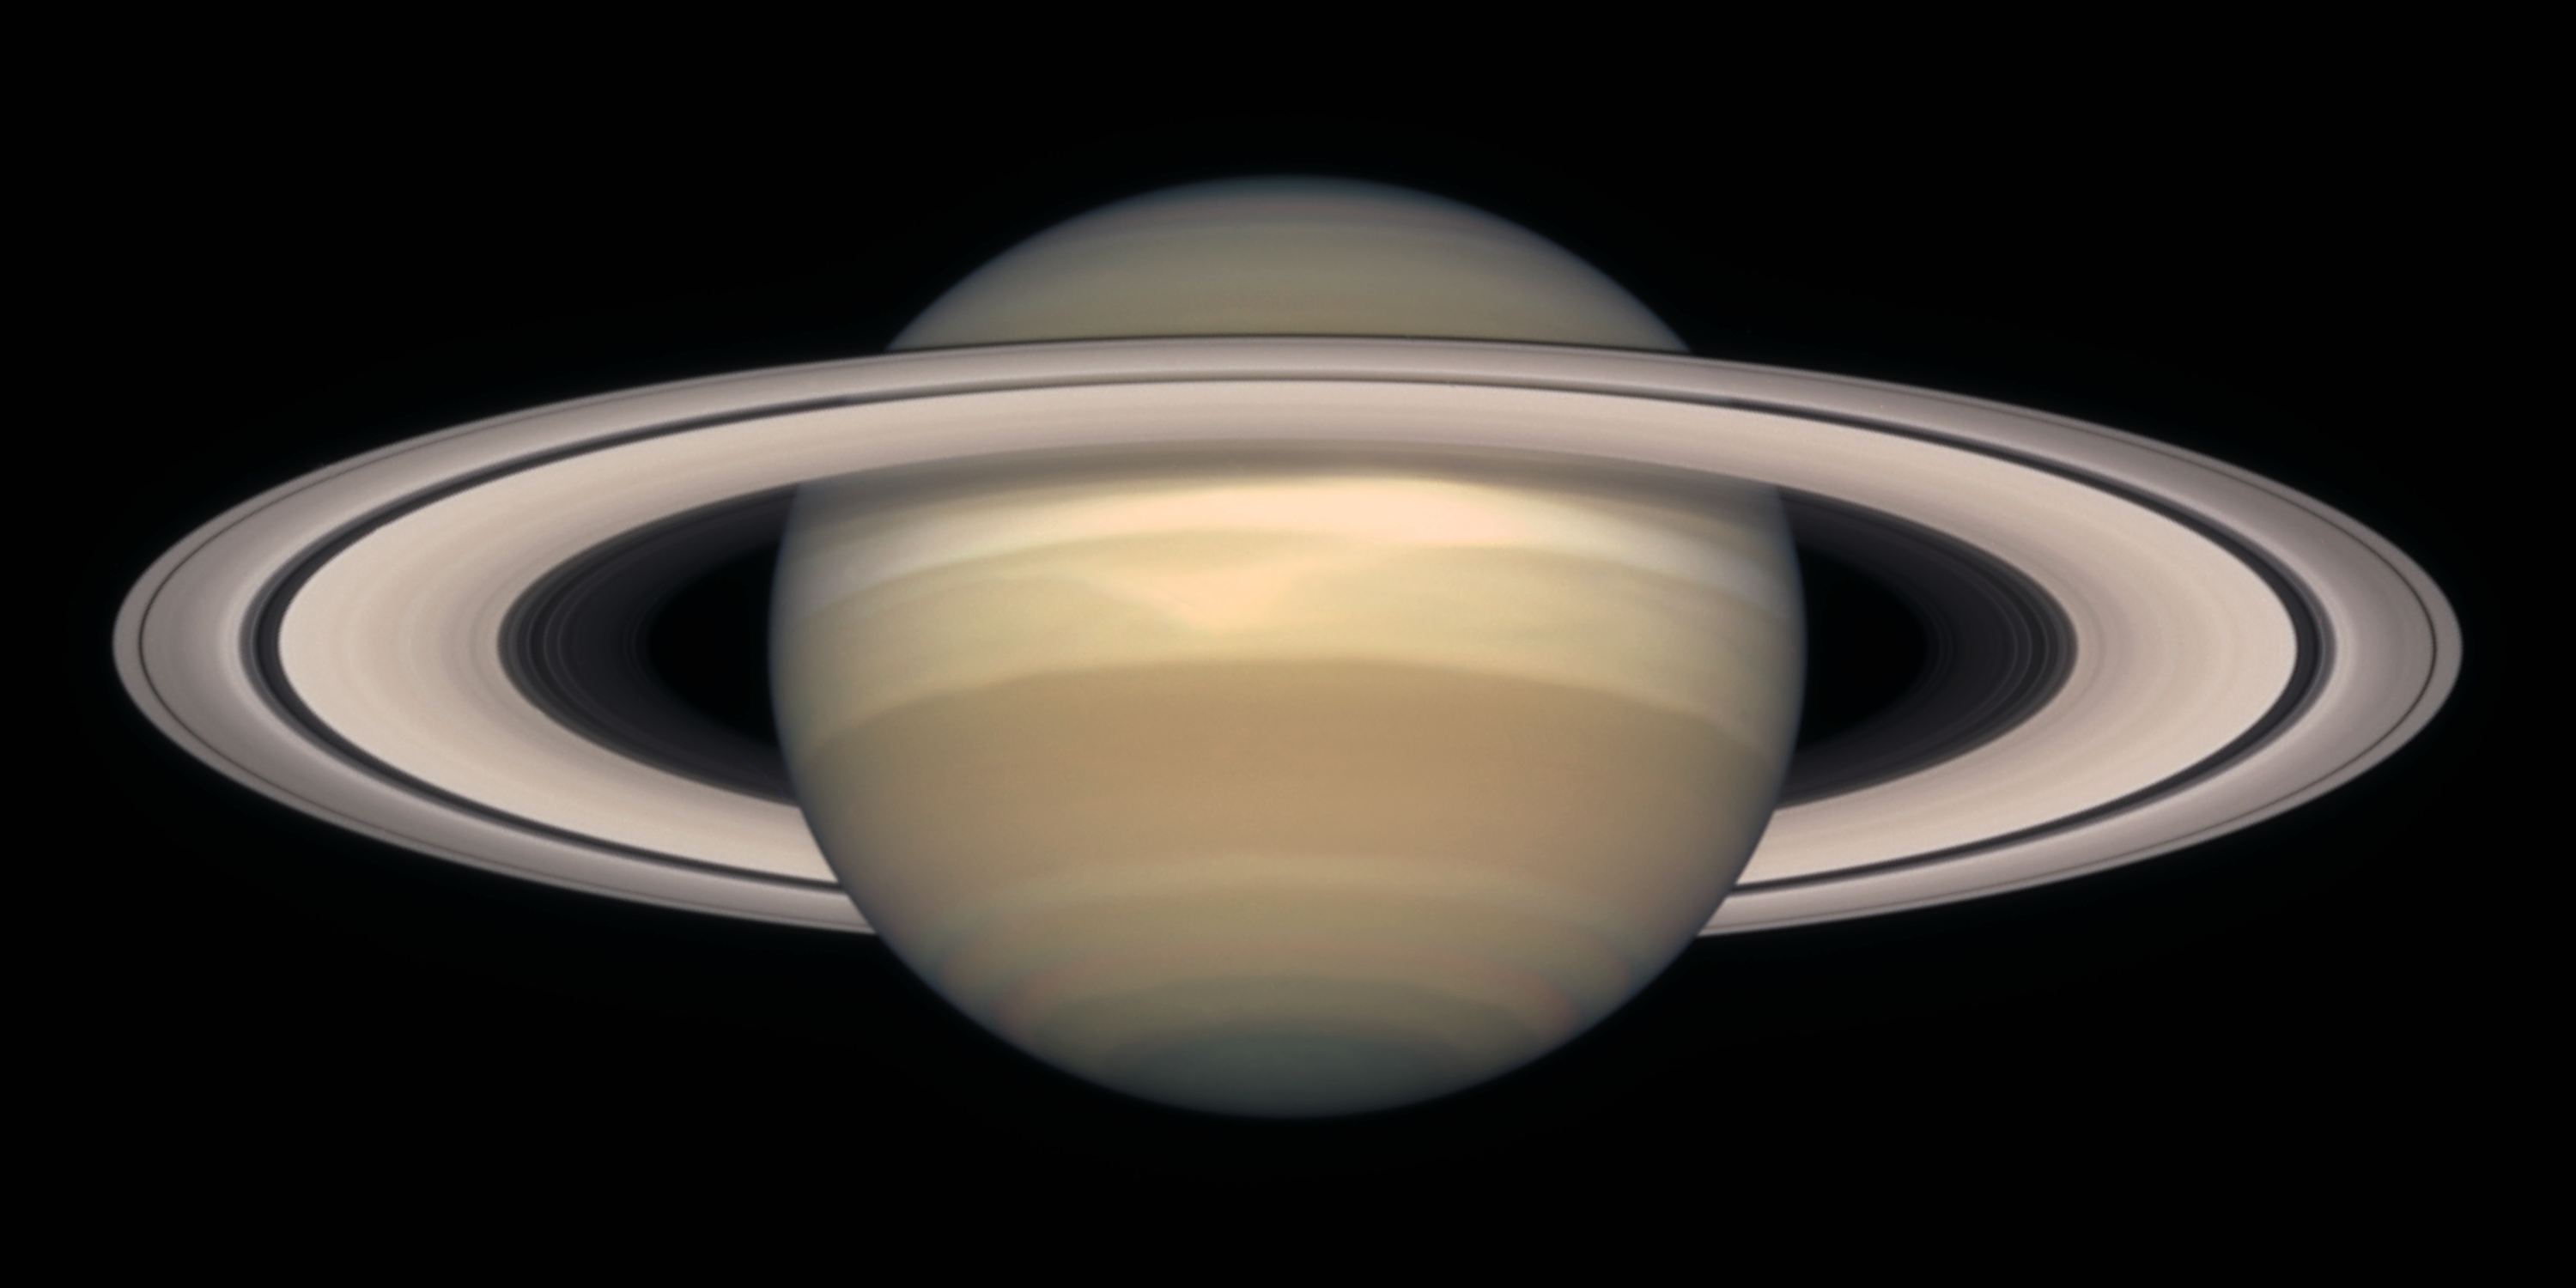

Saturn on October 1998

Saturn is about 75, 000 miles (120, 000 km) across, and is flattened at the poles because of its very rapid rotation. A day is only 10 hours long on Saturn. Strong winds account for the horizontal bands in the atmosphere of this giant gas planet.

The delicate colour variations in the clouds are due to smog in the upper atmosphere, produced when ultraviolet radiation from the Sun shines on methane gas. Deeper in the atmosphere, the visible clouds and gases merge gradually into hotter and denser gases, with no solid surface for visiting spacecraft to land on.

Credit: NASA/ESA and The Hubble Heritage Team (STScI/AURA)